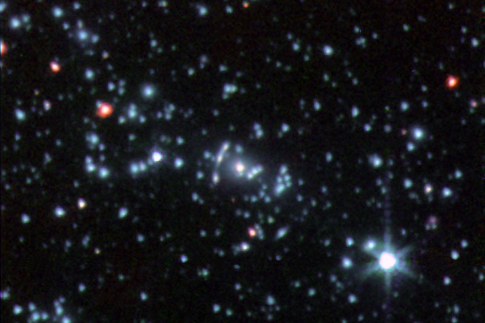

Infrared image of the galaxy Abell 2667

This infrared image was taken by NASA's Spitzer Space Telescope.and shows a part of the galaxy cluster Abell 2667. The "Comet Galaxy" is the bright red object seen to the left of the cluster centre. Also seen in the image is a rare giant infrared arc. The banana-shaped arc corresponds to the magnified and distorted image of a distant galaxy that lies behind the cluster's core.

Credit: NASA, Spitzer Space Telescope